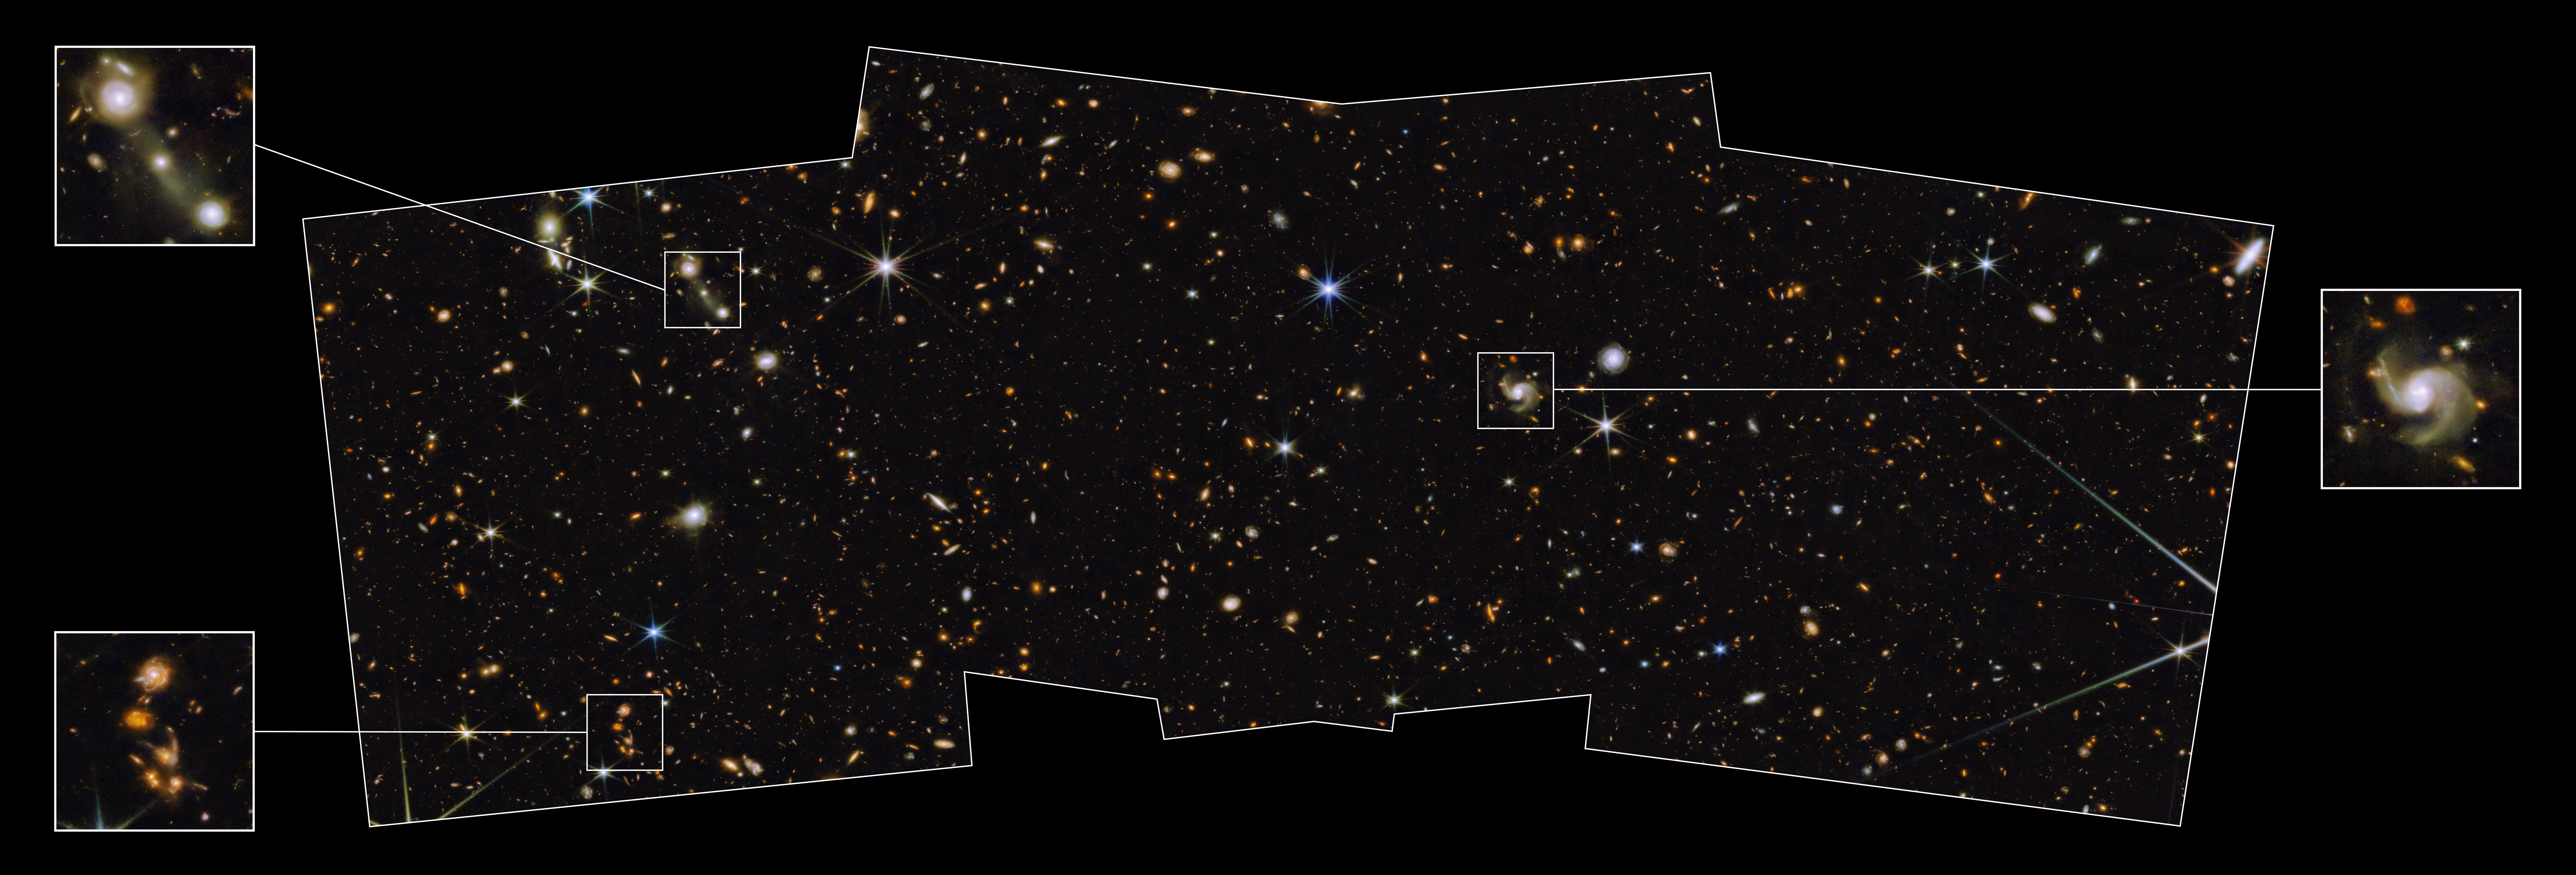

Webb Glimpses Field of Extragalactic PEARLS, Studded With Galactic Diamonds

The NASA/ESA/CSA James Webb Space Telescope has captured one of the first medium-deep wide-field images of the cosmos, featuring a region of the sky known as the North Ecliptic Pole. The image, which accompanies a paper published in the Astronomical Journal, is from the Prime Extragalactic Areas for Reionization and Lensing Science (PEARLS) GTO program.

“Medium-deep” refers to the faintest objects that can be seen in this image, which are about 29th magnitude (1 billion times fainter than what can be seen with the unaided eye), while “wide-field” refers to the total area that will be covered by the program, about one-twelfth the area of the full moon. The image is composed of eight different colors of near-infrared light captured by Webb’s Near-Infrared Camera (NIRCam), augmented with three colors of ultraviolet and visible light from the NASA/ESA Hubble Space Telescope. This beautiful color image unveils in unprecedented detail and to exquisite depth a universe full of galaxies to the furthest reaches, many of which were previously unseen by Hubble or the largest ground-based telescopes, as well as an assortment of stars within our own Milky Way galaxy. The NIRCam observations will be combined with spectra obtained with Webb’s Near-Infrared Imager and Slitless Spectrograph (NIRISS), allowing the team to search for faint objects with spectral emission lines, which can be used to estimate their distances more accurately.

A swath of sky measuring 2% of the area covered by the full moon was imaged here with NIRCam instrument in eight filters and with Hubble’s Advanced Camera for Surveys (ACS) and Wide-Field Camera 3 (WFC3) in three filters that together span the 0.25 – 5-micron wavelength range. This image represents a portion of the full PEARLS field, which will be about four times larger. Thousands of galaxies over an enormous range in distance and time are seen in exquisite detail, many for the first time. Light from the most distant galaxies has traveled almost 13.5 billion years to reach us. Because this image is a combination of multiple exposures, some stars show additional diffraction spikes.

This representative-color image was created using Hubble filters F275W (purple), F435W (blue), and F606W (blue); and Webb filters F090W (cyan), F115W (green), F150W (green), F200W (green), F277W (yellow), F356W (yellow), F410M (orange), and F444W (red).

Credit: NASA, ESA, CSA, A. Pagan (STScI) & R. Jansen (ASU)